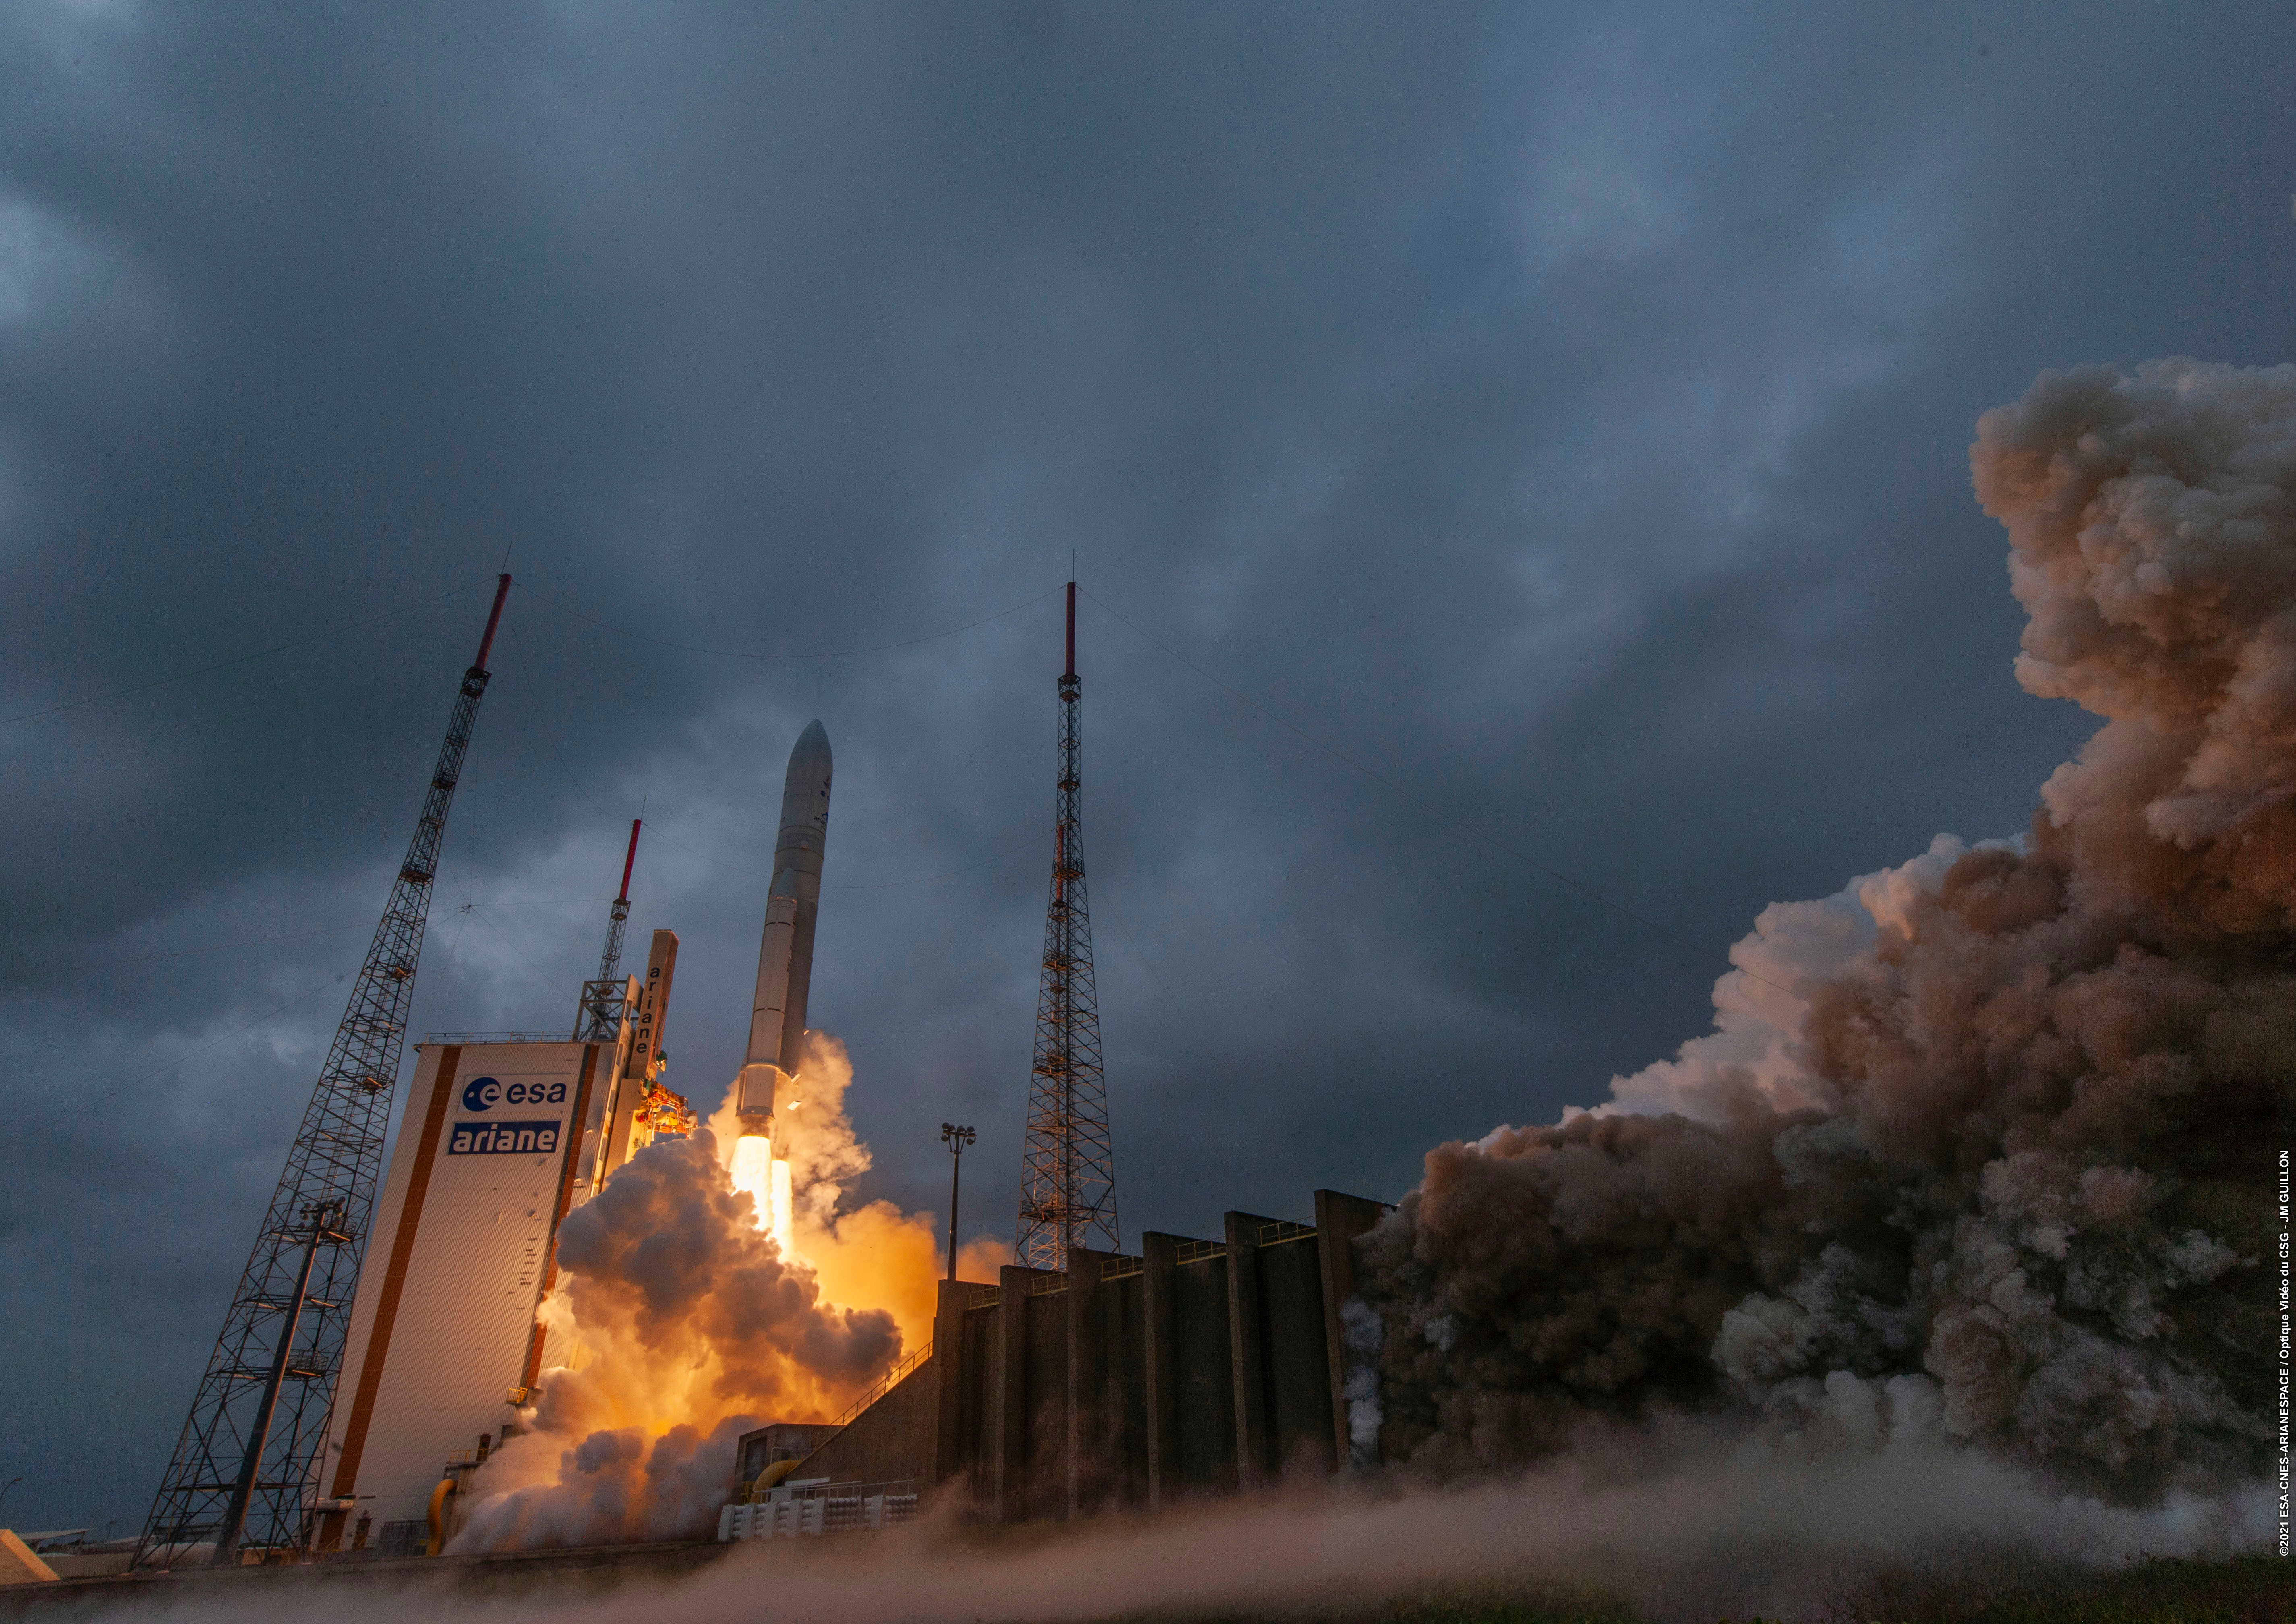

Webb liftoff on Ariane 5

The James Webb Space Telescope lifted off on an Ariane 5 rocket from Europe’s Spaceport in French Guiana, at 13:20 CET on 25 December on its exciting mission to unlock the secrets of the Universe.

Credit: ESA/CNES/Arianespace/Optique Vidéo du CSG - JM Guillon